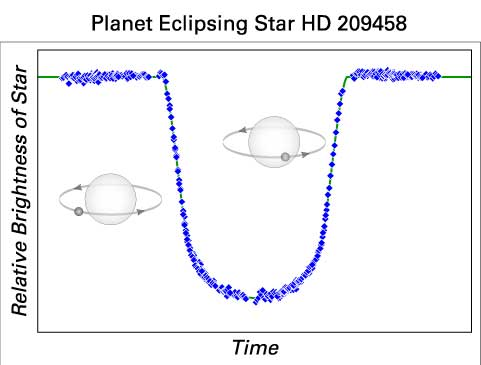

A Planet's telltale signature

This diagram illustrates how a planet passing in front of a star blocks a tiny amount of starlight. In this case, it's a planet crossing the face of a nearby star called HD 209458, located 153 light-years from Earth in the constellation Pegasus. The dip in the center of the diagram represents a 1.7 percent drop in starlight over a three-hour period as the planet moves across the star's disk. By watching this eclipse, astronomers can confirm a planet's existence.

Credit: NASA/ESA, T.M. Brown, D. Charbonneau, R.L. Gilliland, R.W. Noyes, & A. Burrows.